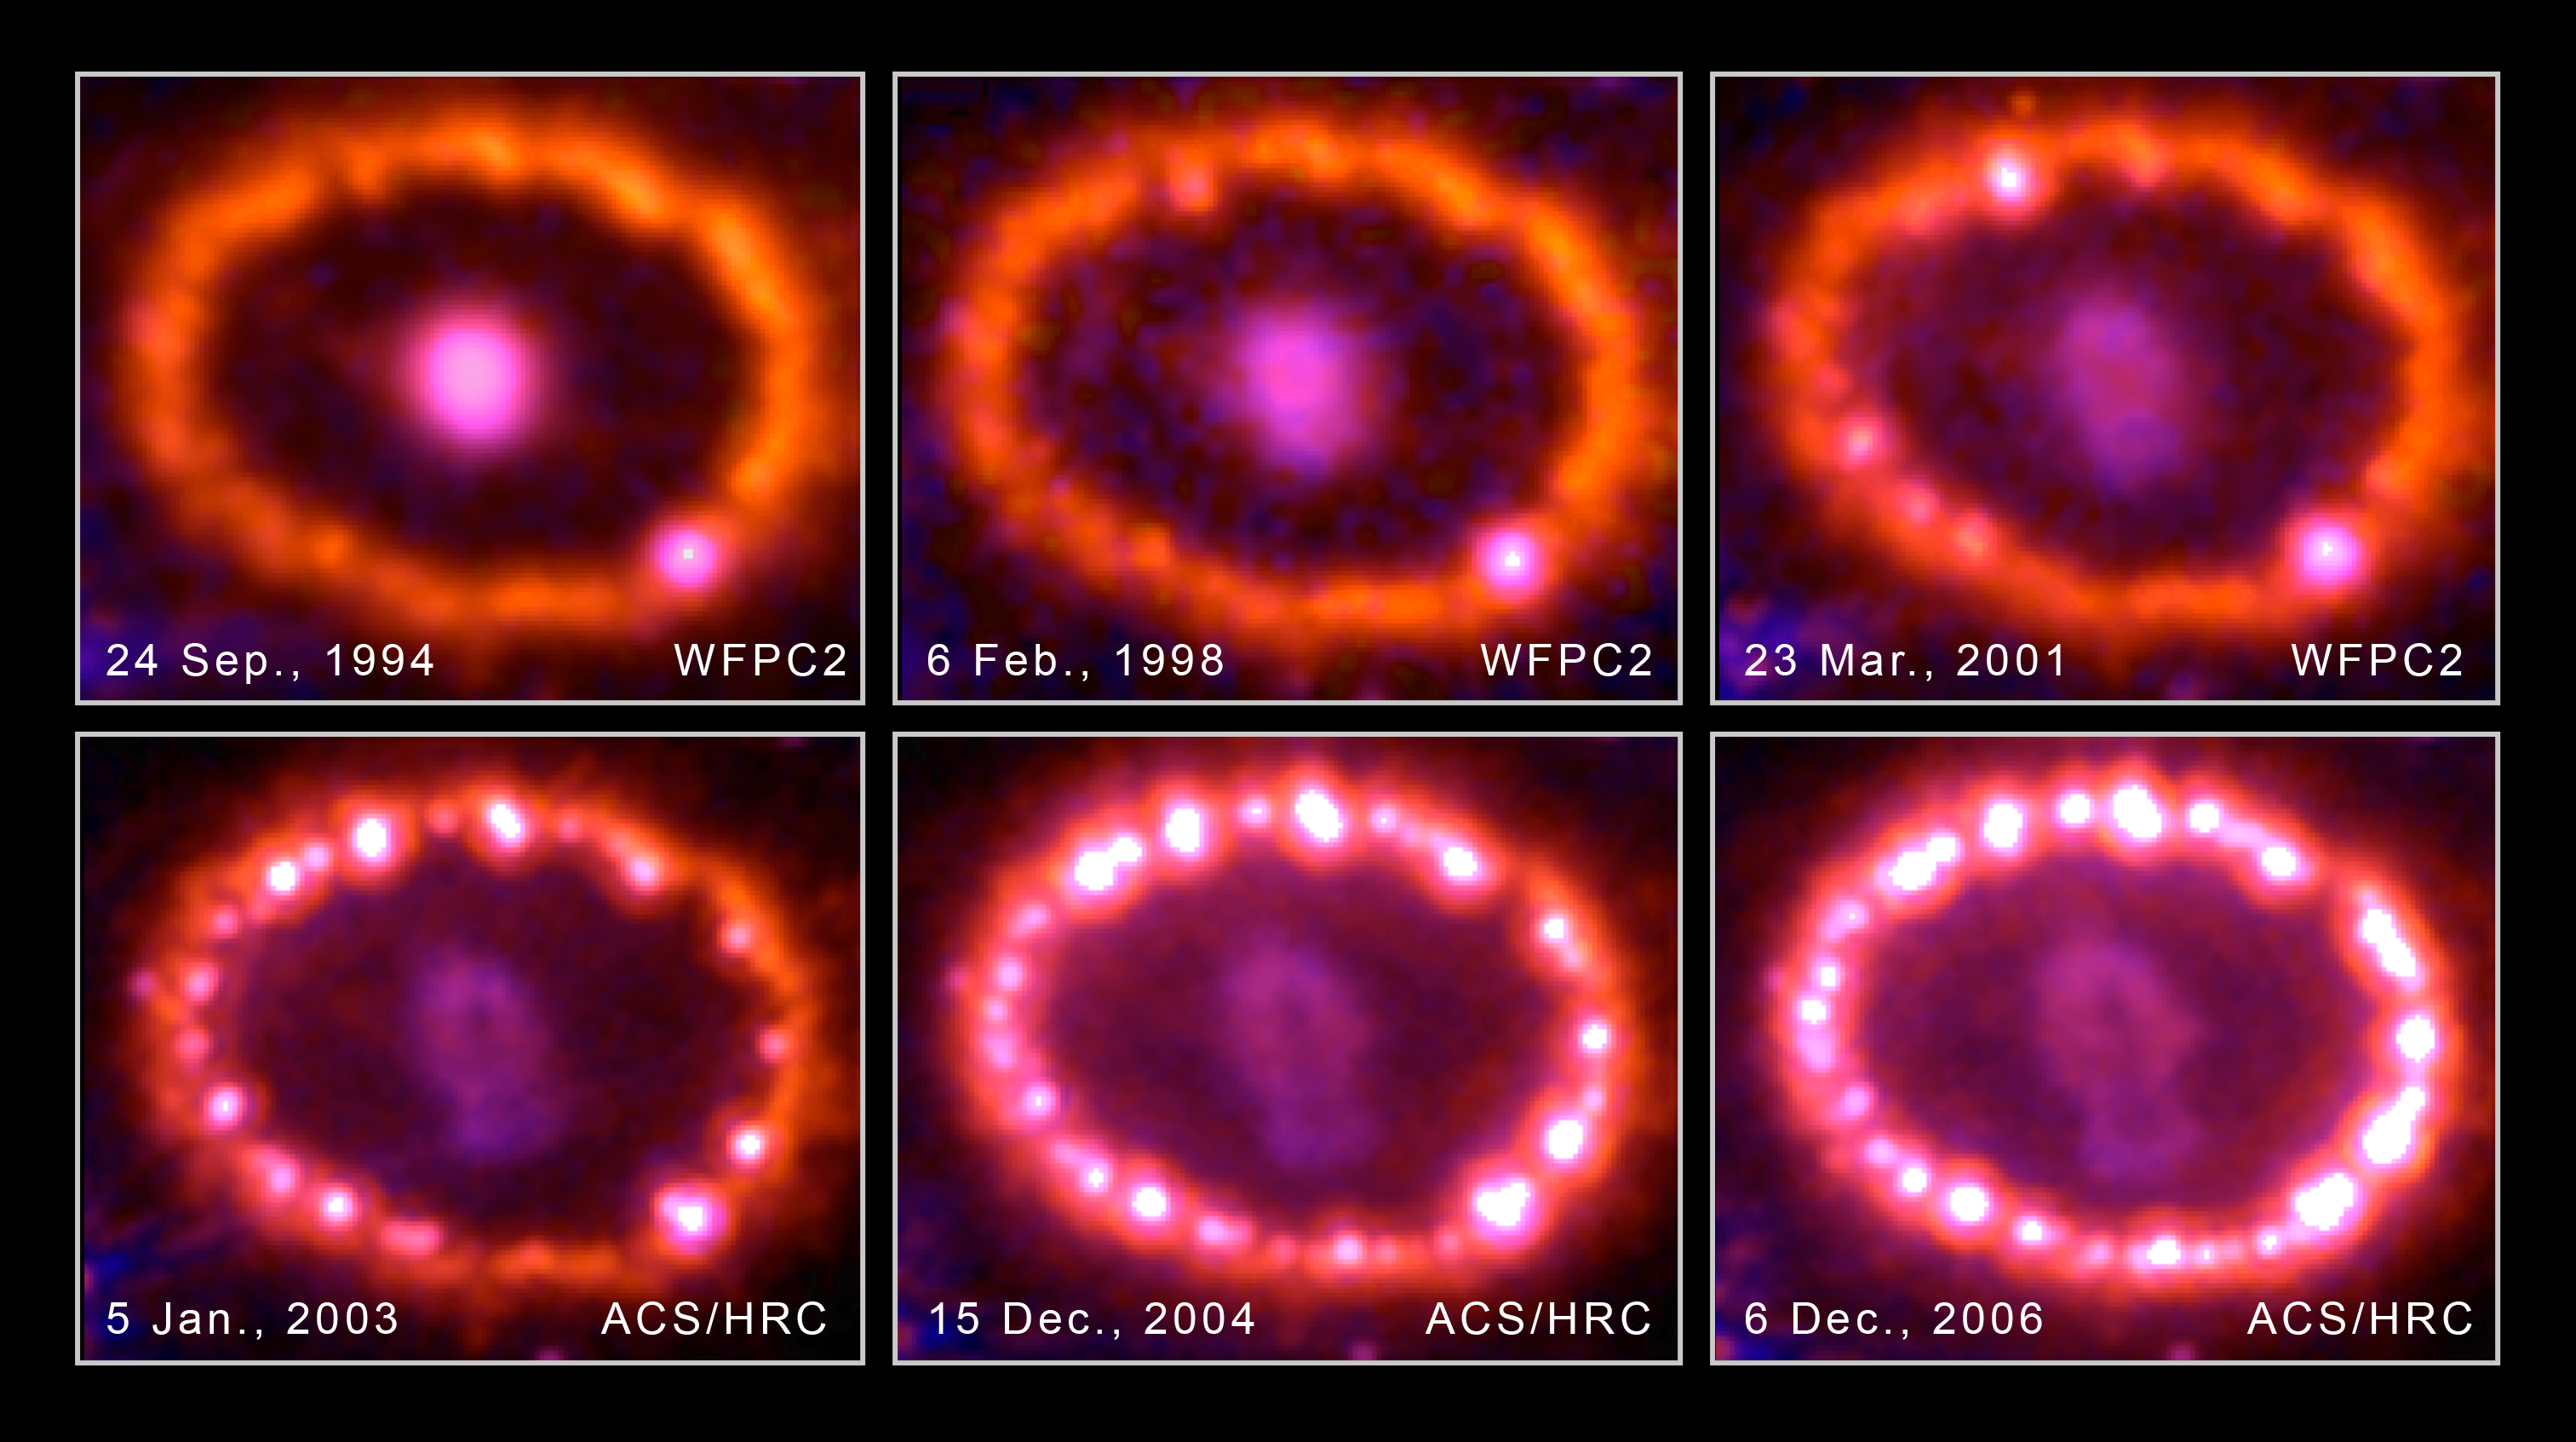

Hubble Images Chronicle the Inner Ring's Light Show

This photo album of images from NASA/ESA Hubble Space Telescope shows a ring of gas beginning to glow around an exploded star.

The stellar blast, called Supernova 1987A, was first spotted 20 years ago. The explosion is one of the brightest supernova blasts in more than 400 years. Hubble began watching the blast's aftermath shortly after it was launched in 1990.

The growing number of bright spots on the ring was produced by an onslaught of material unleashed by the blast. The shock wave of material is slamming into the ring's innermost regions, heating them up, and causing them to glow. The ring, about a light-year across, was probably shed by the star about 20,000 years before the star exploded.

Astronomers detected the first bright spot in 1997, but now they see dozens of spots around the ring. Only Hubble can see the individual bright spots. In the next few years, the entire ring will be ablaze as it absorbs the full force of the crash. The glowing ring is expected to become bright enough to illuminate the star's surroundings, providing astronomers with new information on how the star expelled material before the explosion.

The bright spot that appears to be on the ring at lower right is actually a foreground star. Supernova 1987A is 163,000 light-years away in the Large Magellanic Cloud.

The images were taken between 1994 and 2006 with Hubble's Wide Field Planetary Camera 2 and Advanced Camera for Surveys.

Credit: NASA, ESA, and R. Kirshner (Harvard-Smithsonian Center for Astrophysics)